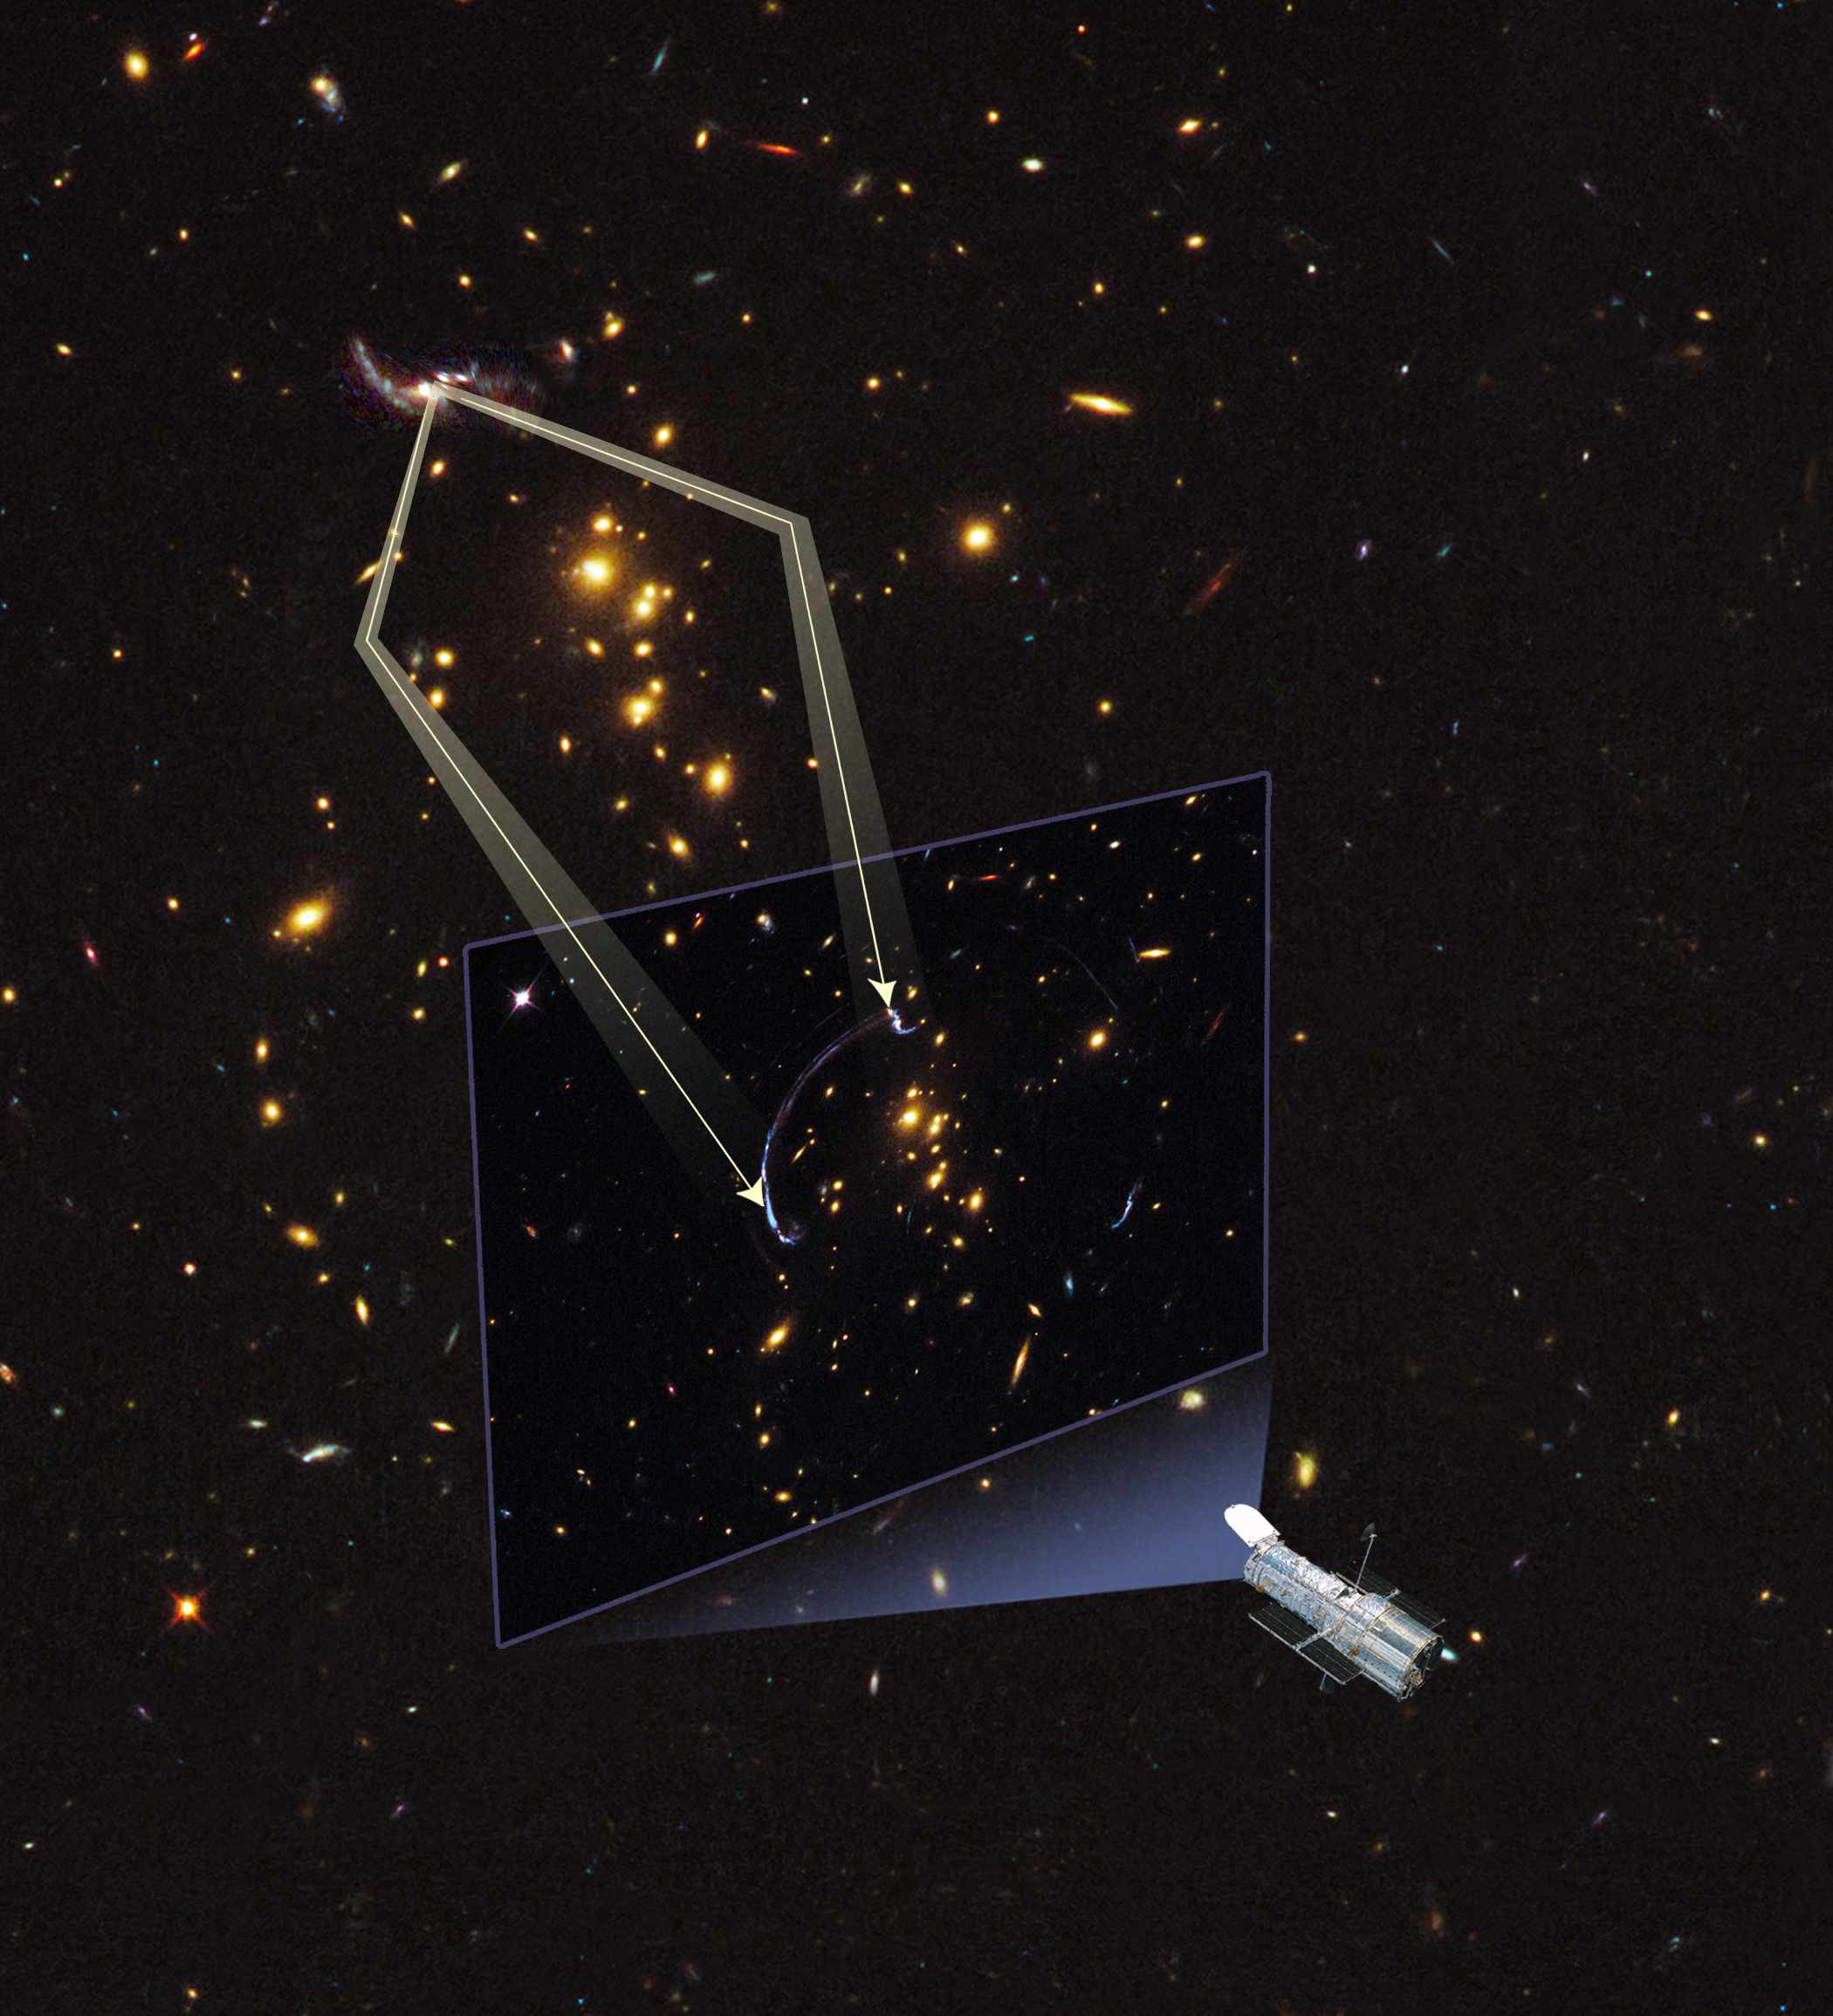

Gravitational lens forms giant arc

This illustration shows how an image of a background galaxy is distorted and magnified by the gravitational field of a foreground galaxy. In this alignment gravity acts as a lens in space by warping space like a funhouse mirror. The image of a distant galaxy is stretched into a giant arc.

Credit: NASA, ESA, and A. Feild (STScI)